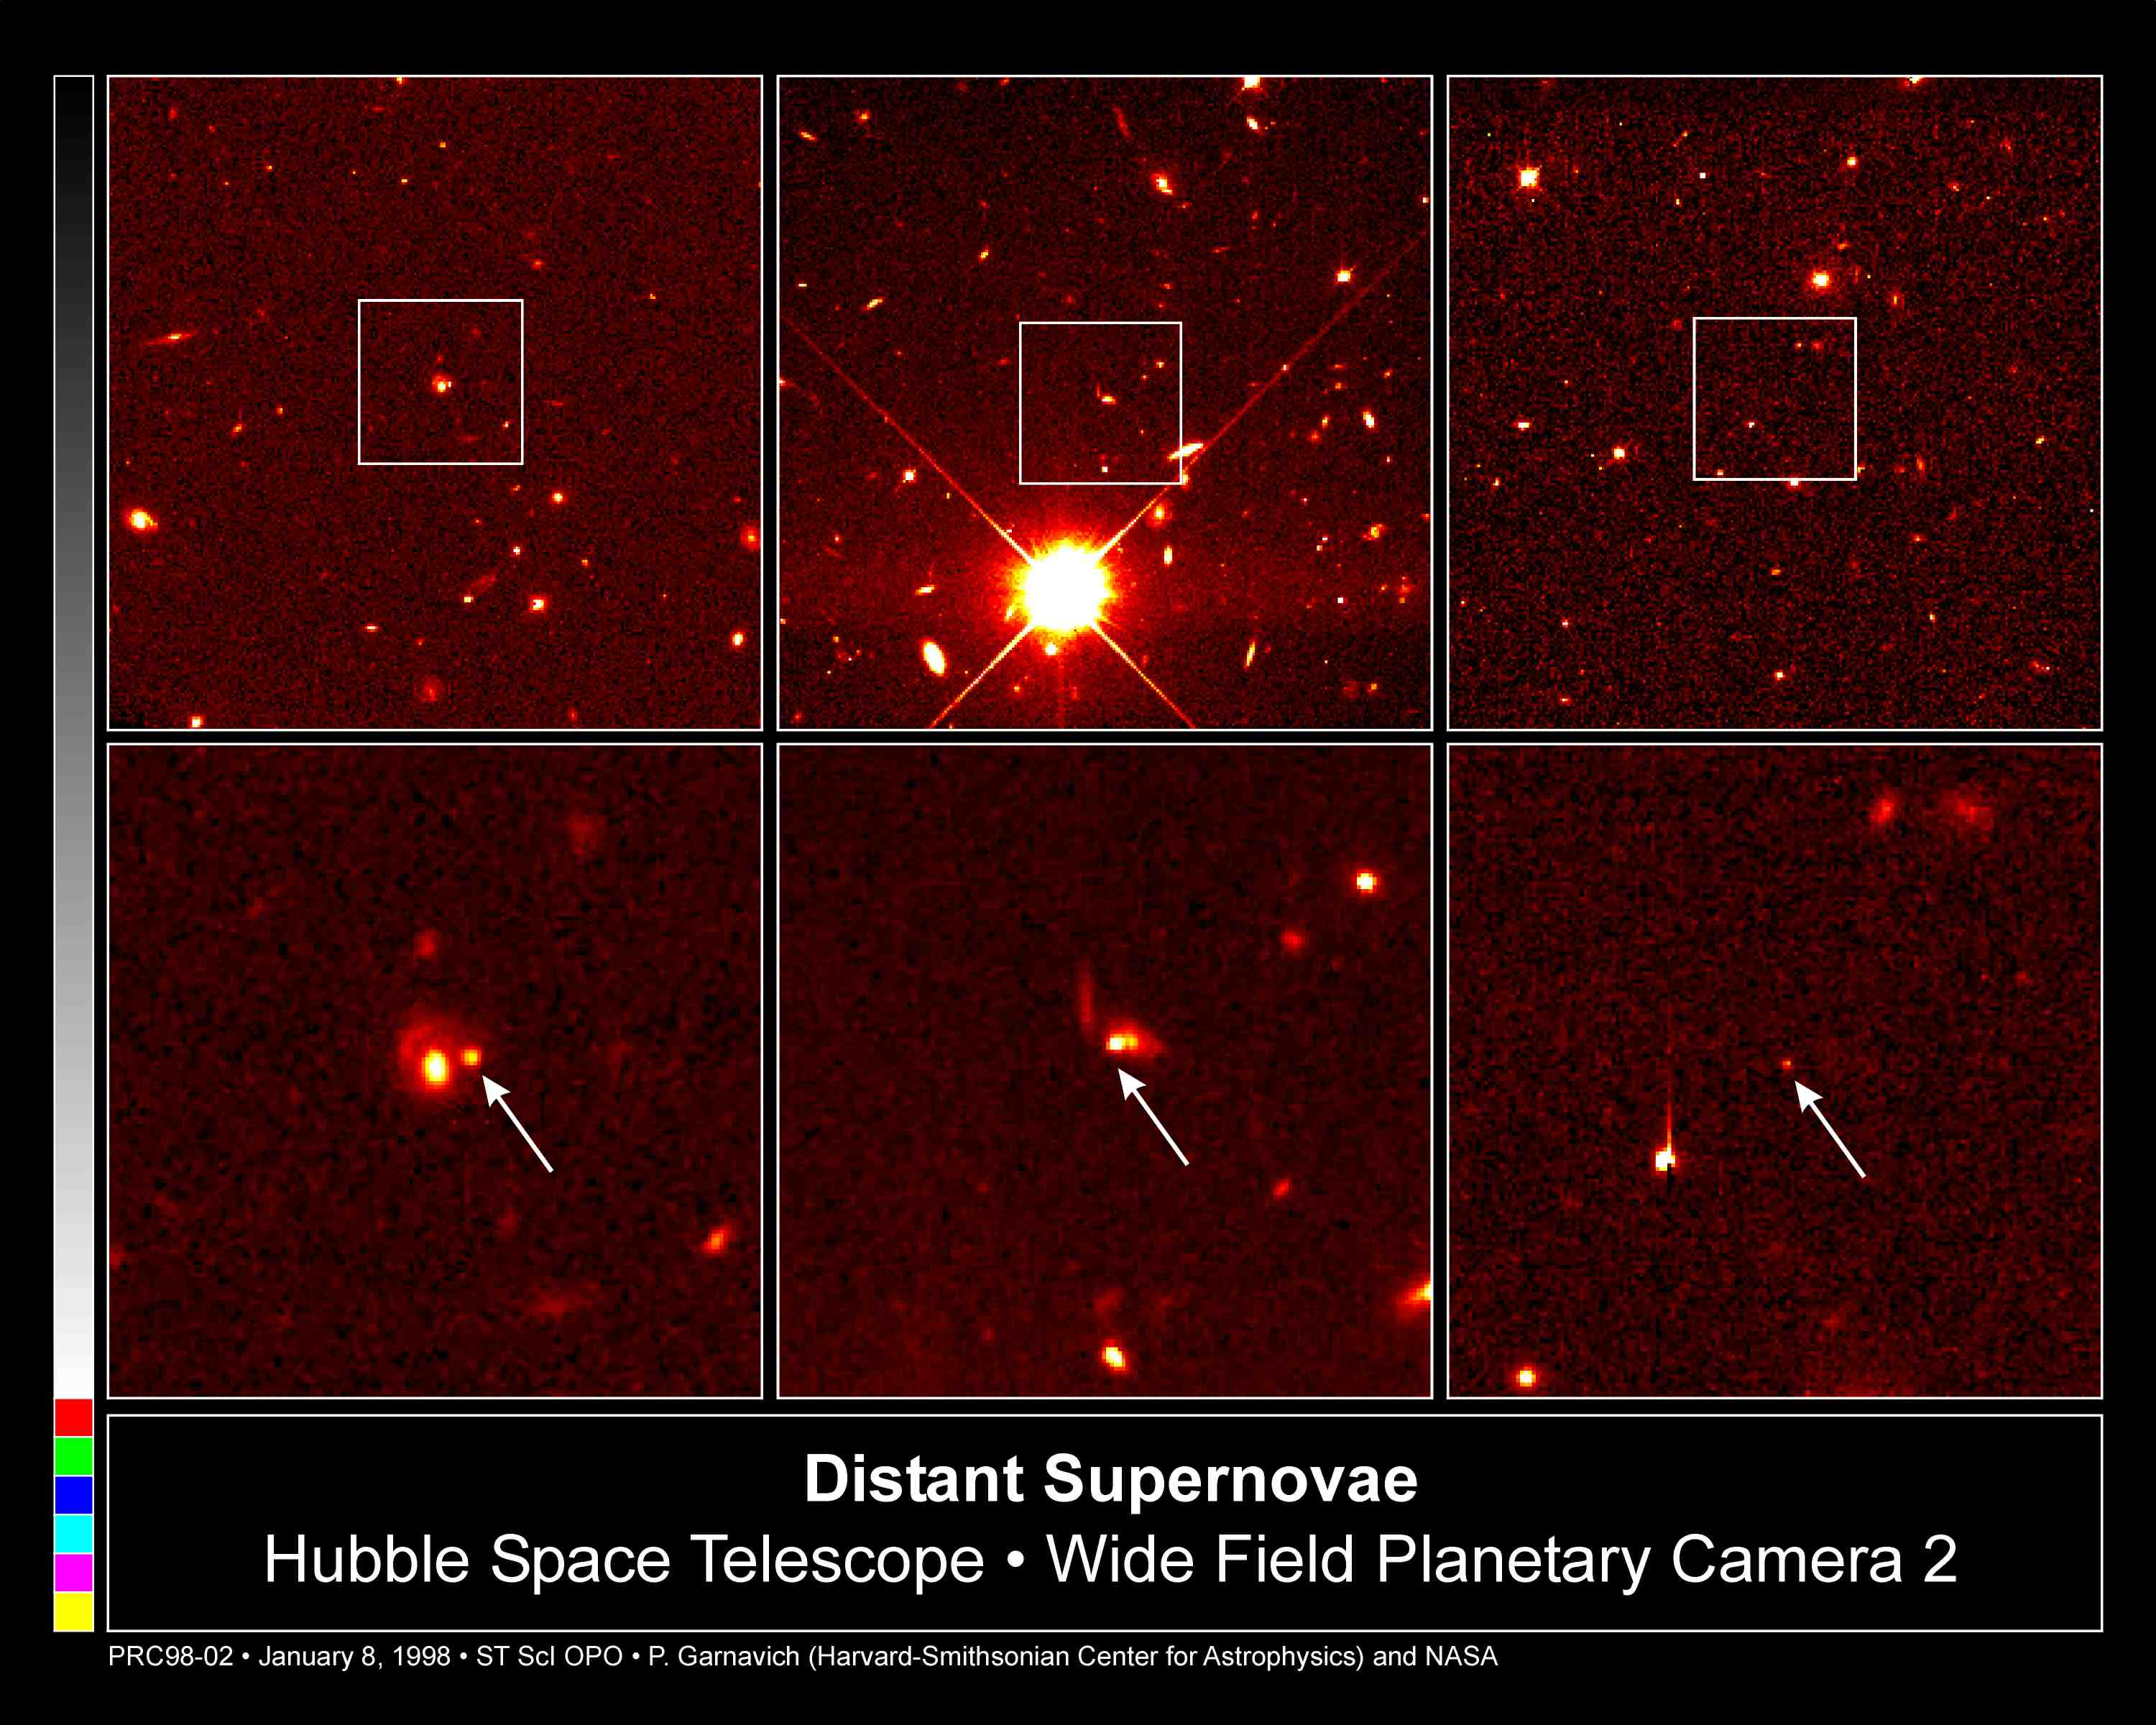

Distant Supernovae

These Hubble Space Telescope images pinpoint three distant supernovae, which exploded and died billions of years ago. Scientists are using these faraway light sources to estimate if the universe was expanding at a faster rate long ago and is now slowing down.

Images of SN 1997cj are in the left hand column; SN 1997ce, in the middle; and SN 1997ck, on the right. All images were taken by the Hubble telescope's Wide Field and Planetary Camera 2. The top row of images are wider views of the supernovae. The supernovae were discovered in April 1997 in a ground-based survey at the Canada-France-Hawaii Telescope on Mauna Kea, Hawaii.

Credit: Peter Garnavich, Harvard-Smithsonian Center for Astrophysics, the High-z Supernova Search Team, and NASA/ESA